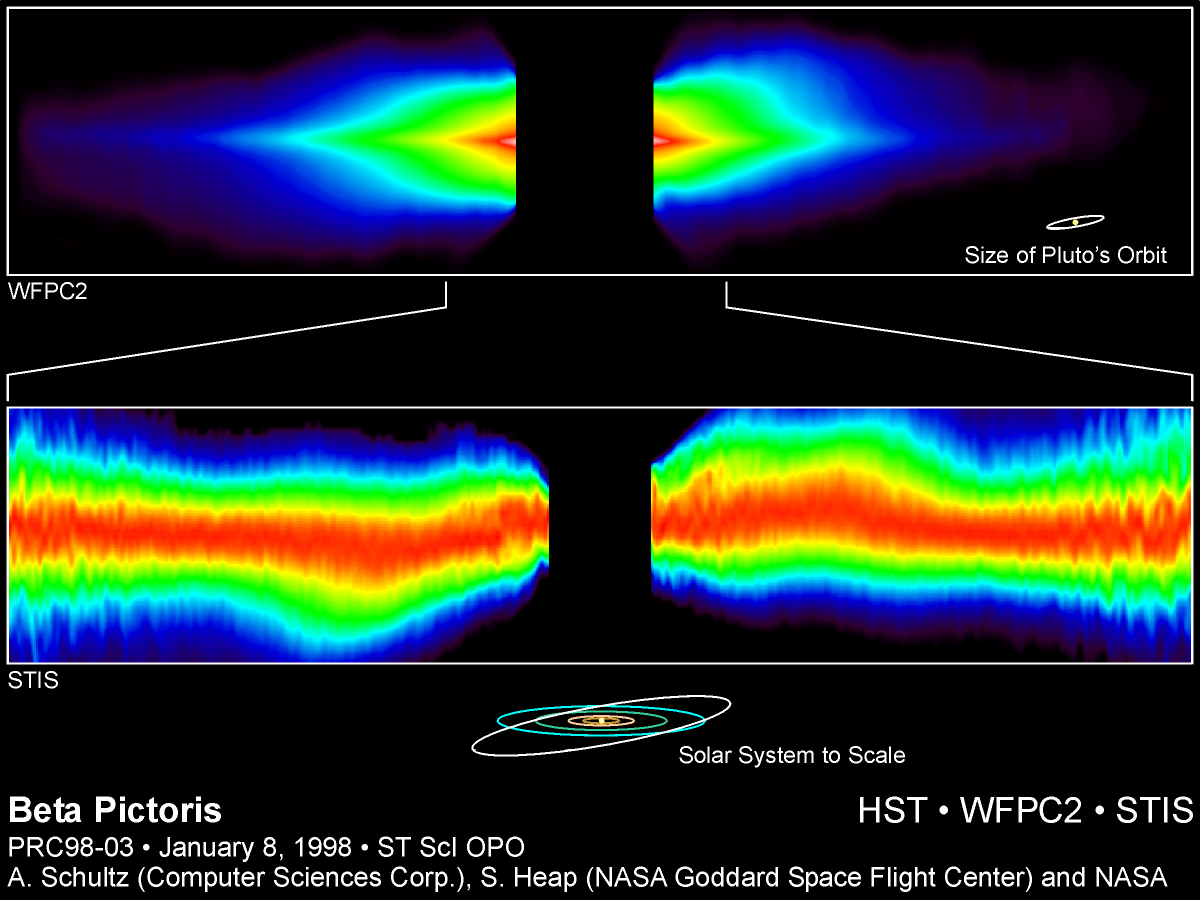

Circumstellar Disk Around Beta Pictoris

These two Hubble Space Telescope visible-light views of the edge- on disk of dust around the star Beta Pictoris yield telltale evidence for the existence of planets, and possibly the gravitational tug of a companion brown dwarf or bypassing star. Both views reveal warps in the disk that might be caused by the gravitational pull of one or more unseen companions. Since its discovery, Beta Pictoris has long been considered one of the nearest examples of an extrasolar planetary system still forming.

Credit: A. Schultz (Computer Sciences Corp.), S. Heap (NASA/ESA Goddard Space FlightCenter) and NASA/ESA